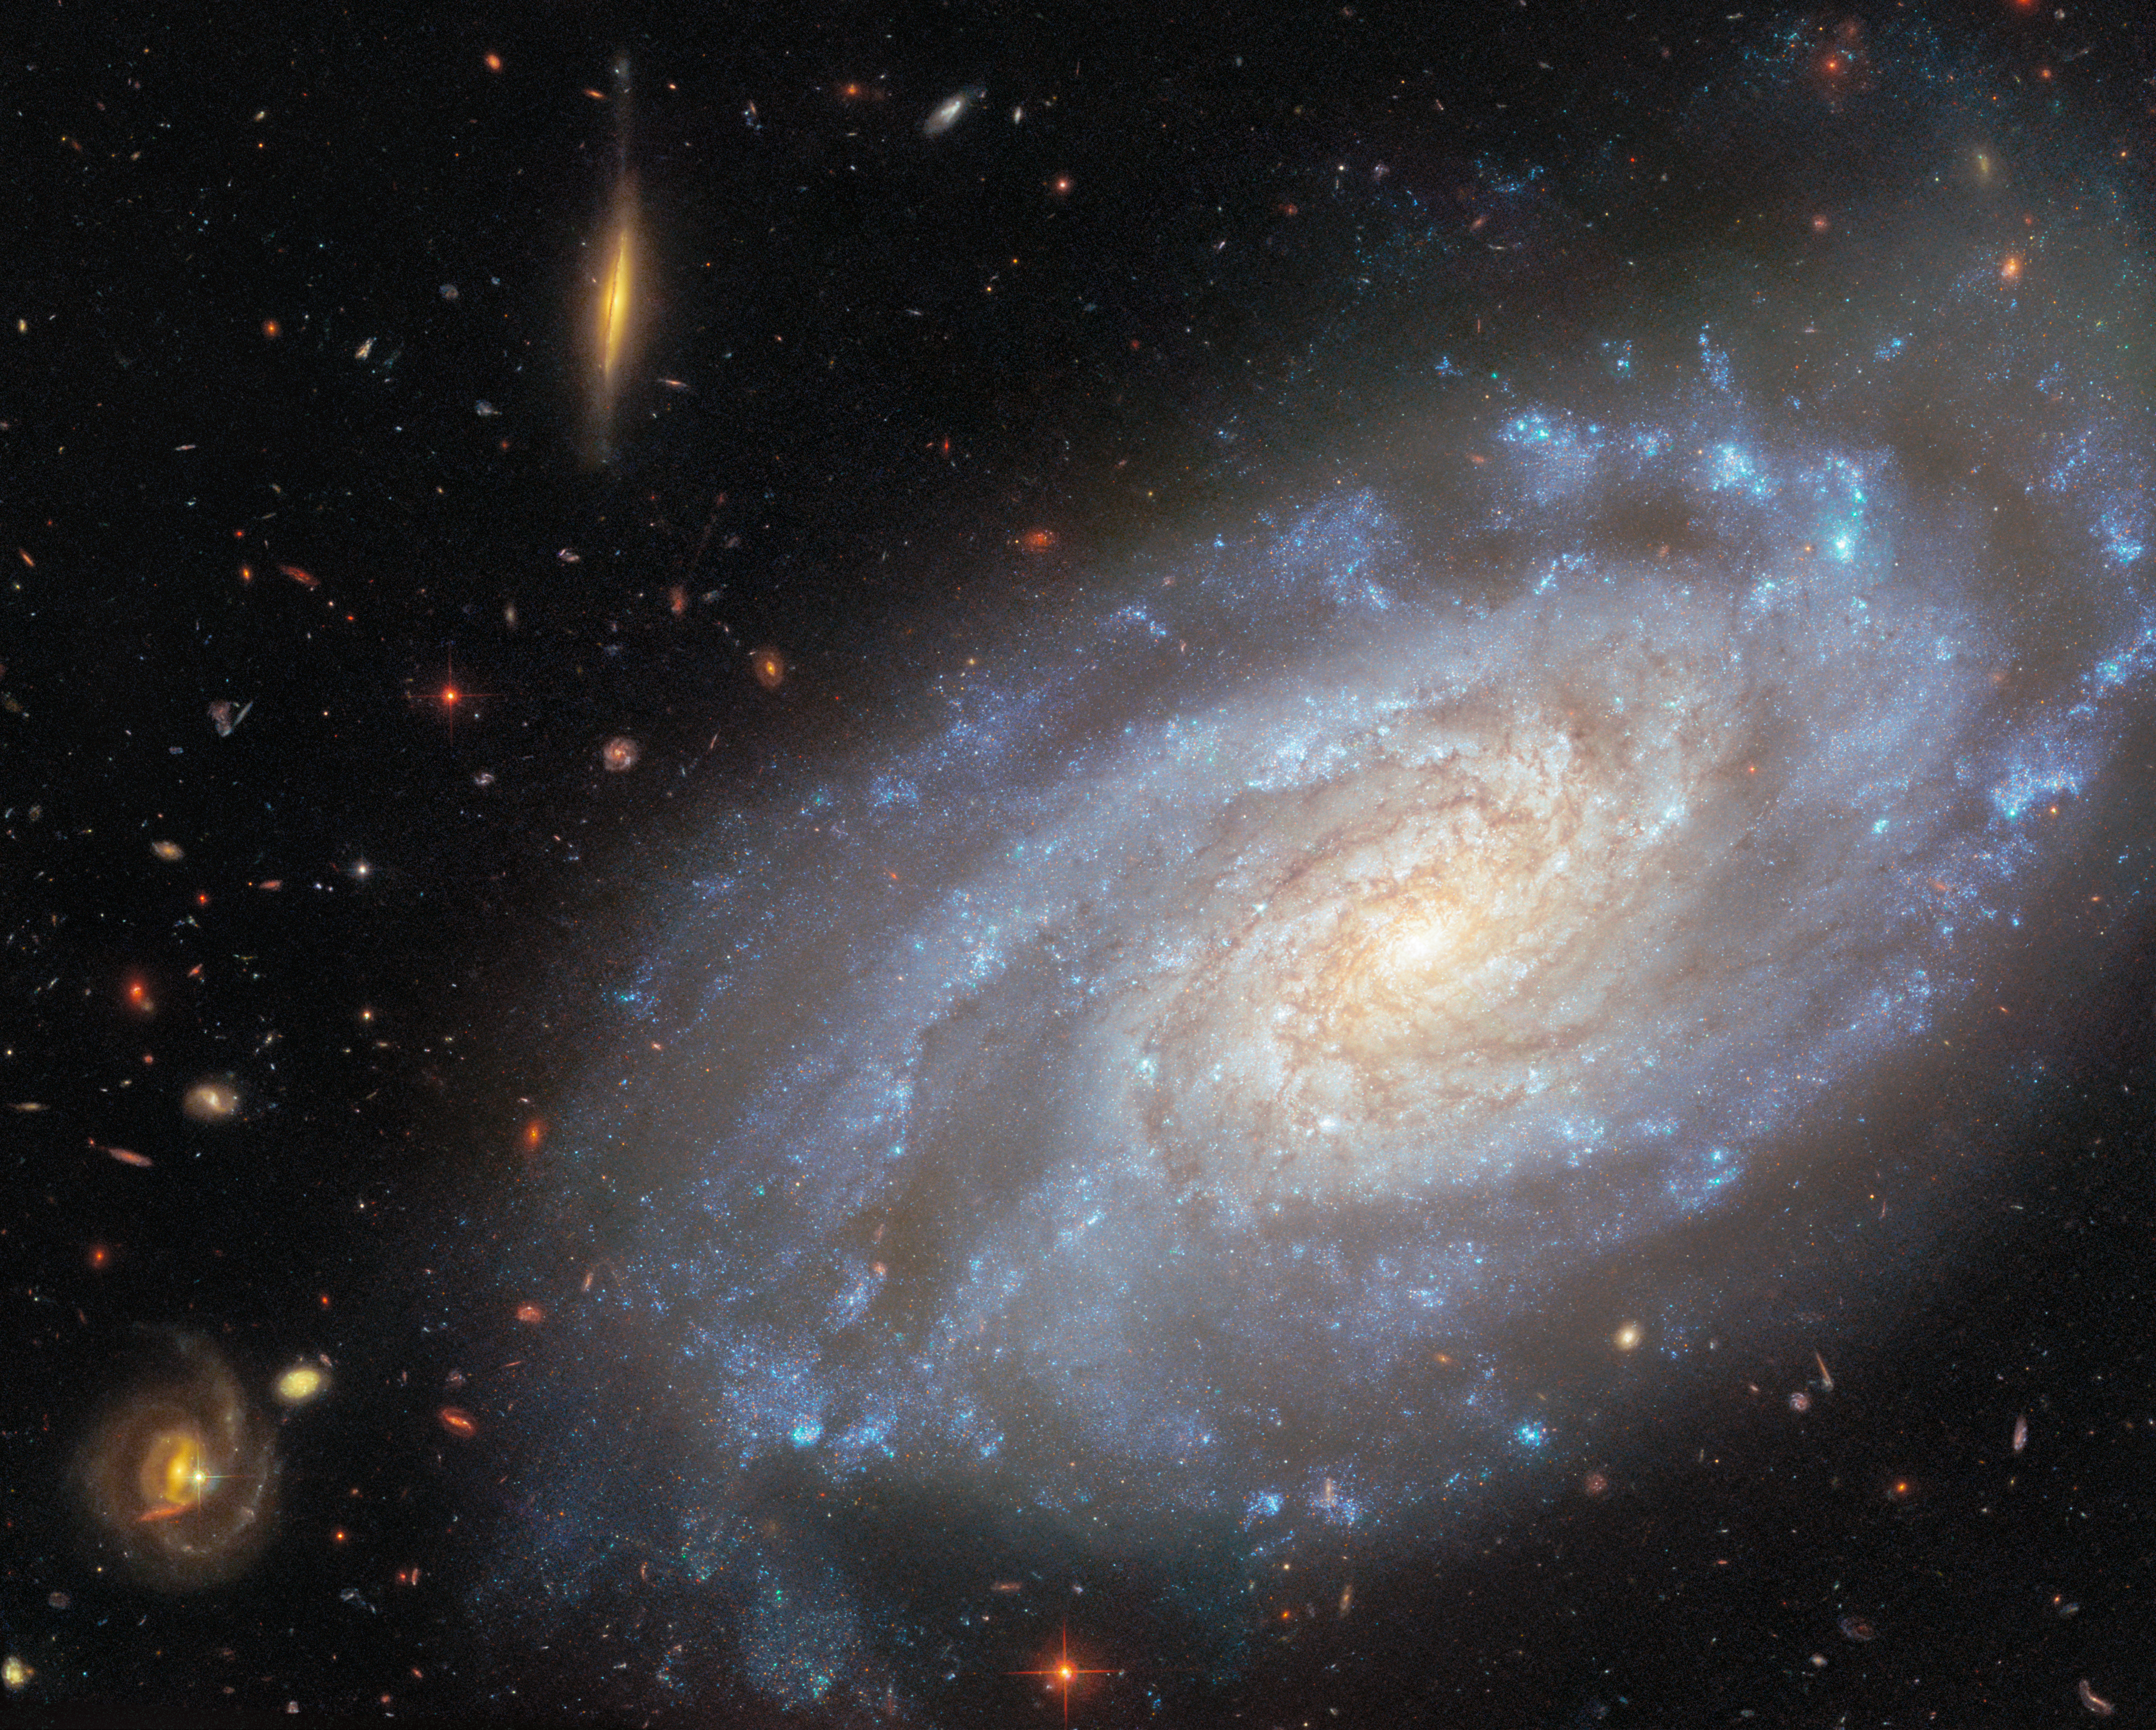

Focusing on NGC 3370

Today’s ESA/Hubble Picture of the Week features a galaxy that Hubble has captured multiple times over more than 20 years. The galaxy is called NGC 3370, and it is a spiral galaxy located nearly 90 million light-years away in the constellation Leo (The Lion).

What is it about this galaxy that makes it a popular target for researchers? NGC 3370 is home to two kinds of objects that astronomers prize for their usefulness in determining distances to faraway galaxies: Cepheid variable stars and Type Ia supernovae.

Cepheid variable stars change in both size and temperature as they pulsate. As a result, the luminosity of these stars varies over a period of days to months. It does so in a way that reveals something important: the more luminous a Cepheid variable star is, the more slowly it pulsates. By measuring how long a Cepheid variable’s brightness takes to complete one cycle, astronomers can determine how bright the star actually is. Paired with how bright the star appears from Earth, this information gives the distance to the star and its home galaxy.

Type Ia supernovae provide a way to measure distances in a single explosive burst rather than through regular brightness variations. Type Ia supernovae happen when the dead core of a star ignites in a sudden flare of nuclear fusion. These explosions peak at very similar luminosities, and much like for a Cepheid variable star, knowing the intrinsic brightness of a supernova explosion allows for its distance to be measured. Observations of Cepheid variable stars and Type Ia supernovae are both critical for precisely measuring how fast our Universe is expanding.

A previous Hubble image of NGC 3370 was released in 2003. The image released today zooms in on the galaxy, presenting a richly detailed view that incorporates wavelengths of light that were not included in the previous version. NGC 3370 is a member of the NGC 3370 group of galaxies along with other Hubble targets NGC 3447 and NGC 3455.

Credit: ESA/Hubble & NASA, A. Riess, K. Noll